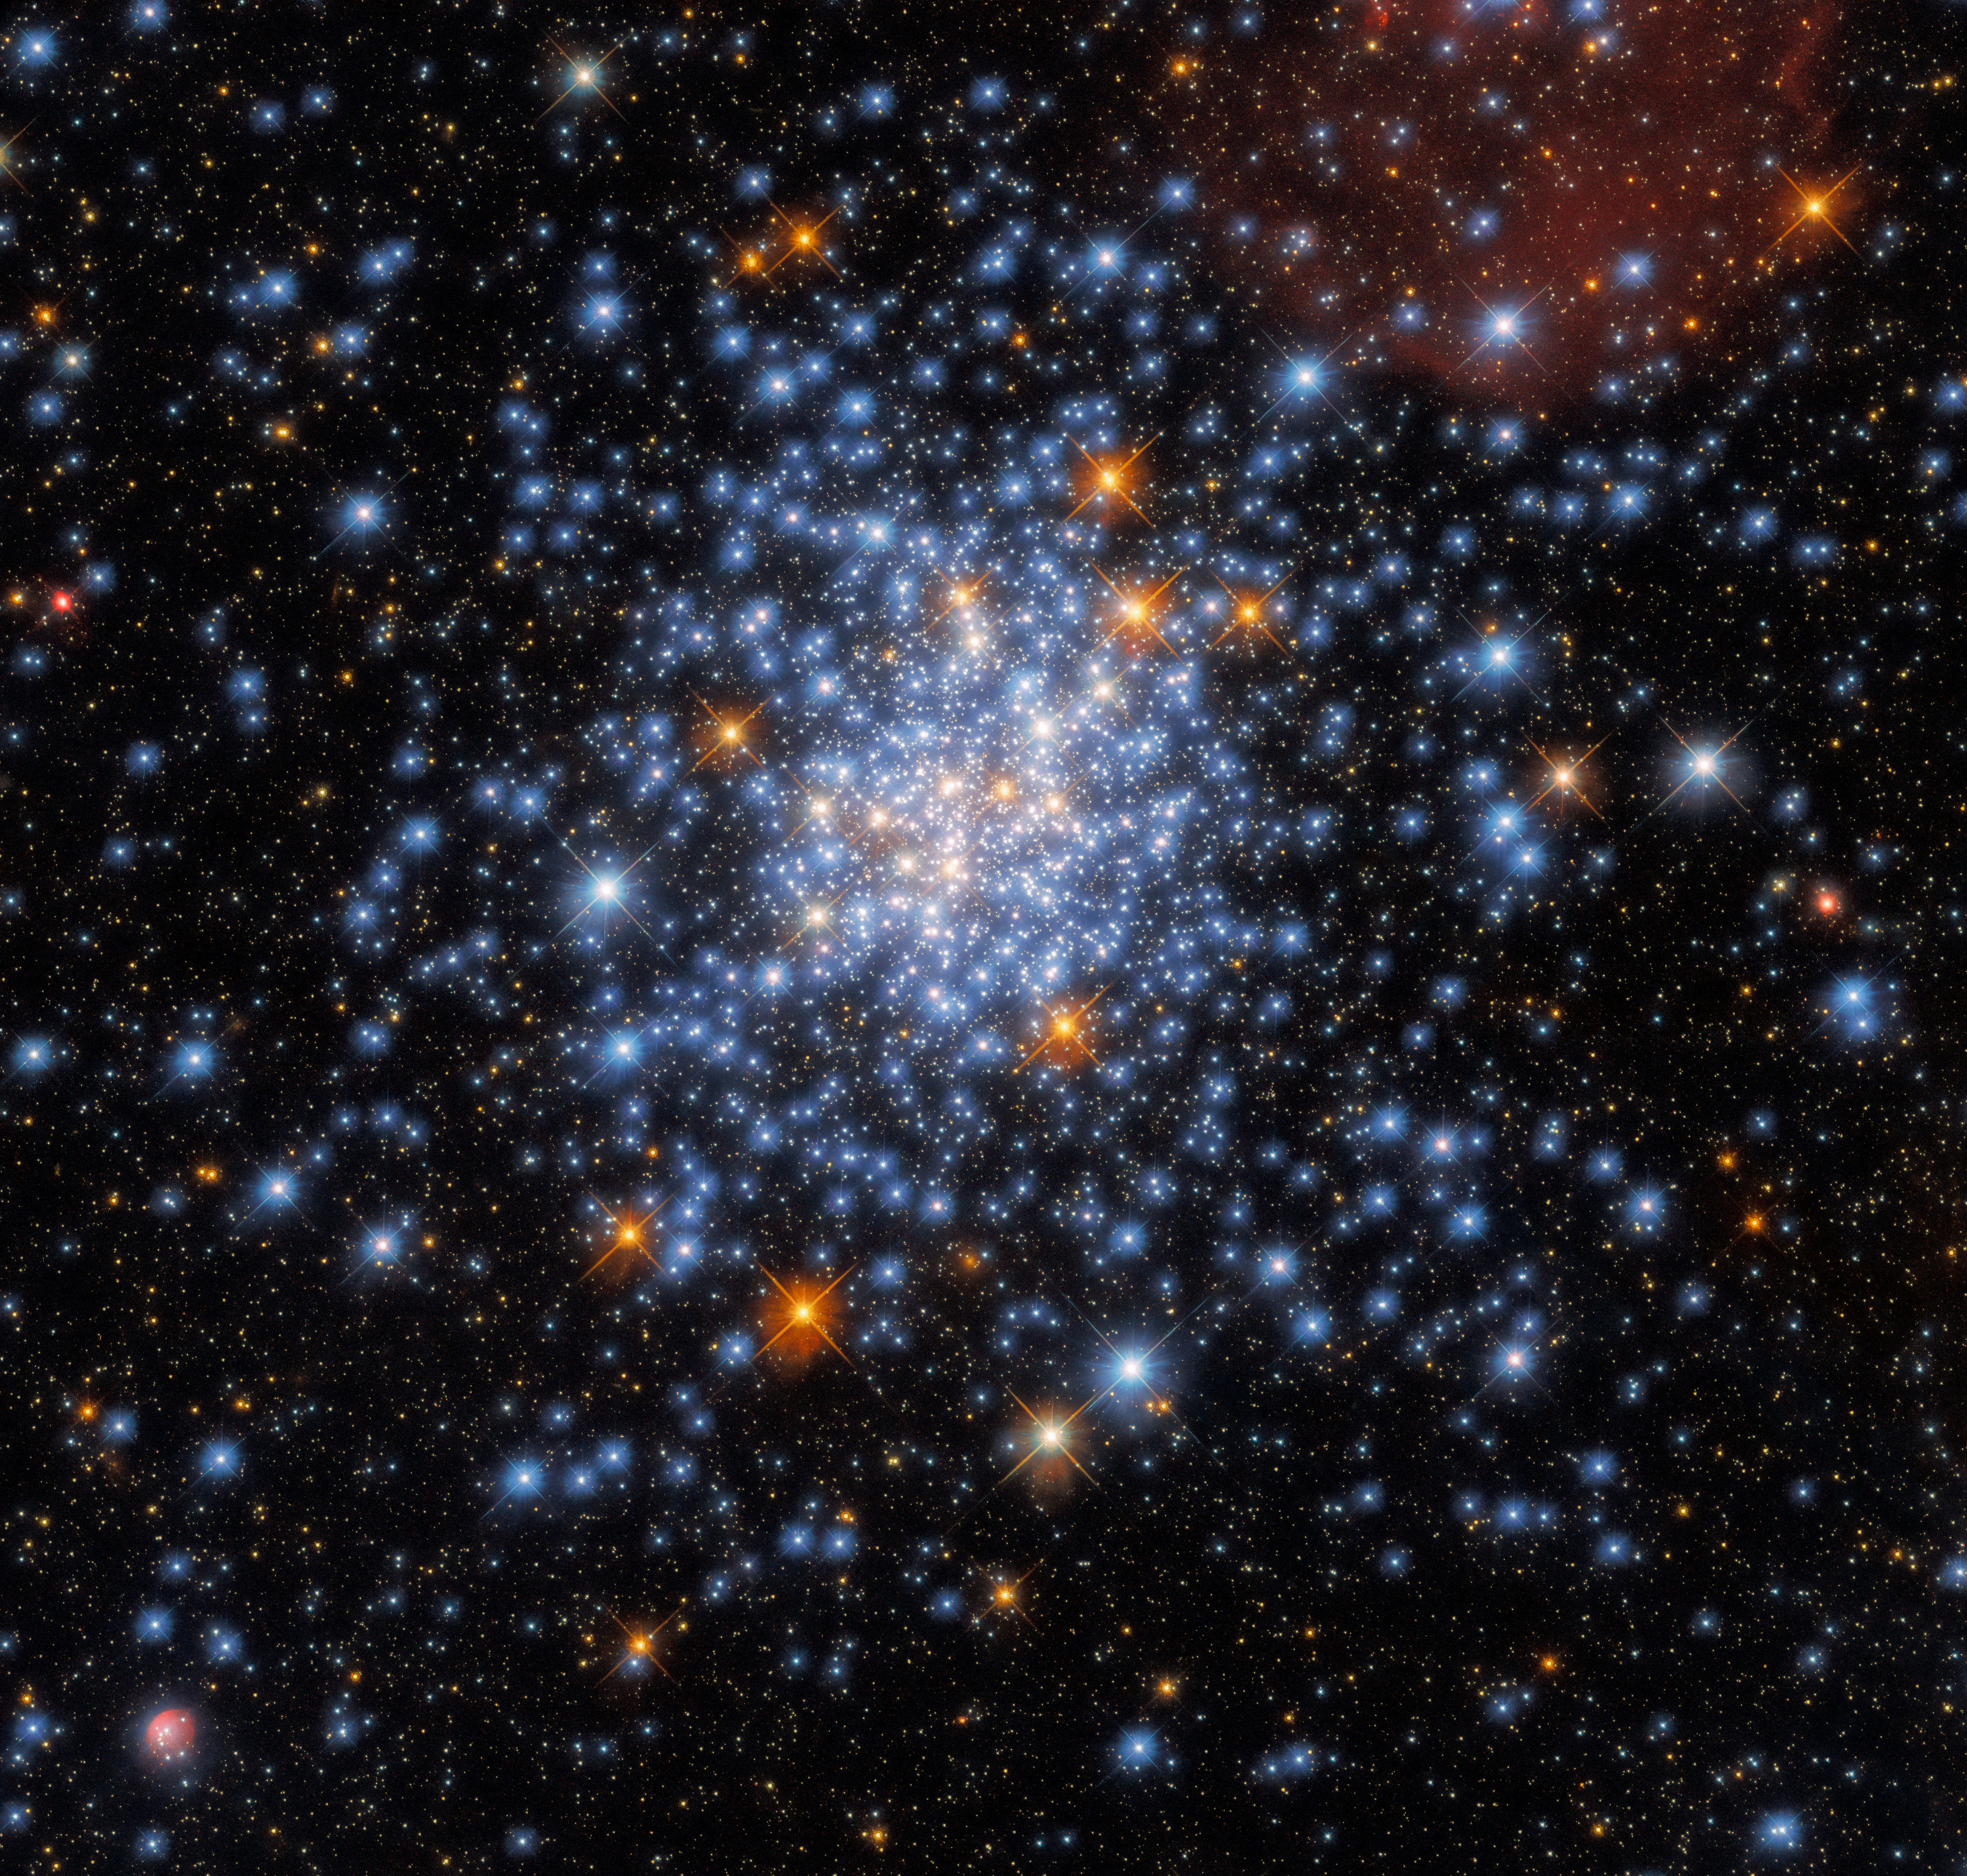

A Scattering of Stars

This Picture of the Week depicts the open star cluster NGC 330, which lies around 180,000 light-years away inside the Small Magellanic Cloud. The cluster — which is in the constellation Tucana (The Toucan) — contains a multitude of stars, many of which are scattered across this striking image.

The most stunning object in this image is actually the very small star cluster in the lower left corner of the image, surrounded by a nebula of ionised hydrogen (red) and dust (blue). Named GALFOR 1, the cluster was discovered in 2018 in Hubble's archival data, which was used to create this latest image from Hubble. To better understand this star cluster, specifically whether the nebula surrounding the cluster also contains a bow shock, scientists will need high resolution infrared imagery from the upcoming NASA/ESA/CSA James Webb Space Telescope.

This image also contains clues about the inner workings of Hubble itself. The criss-cross patterns surrounding the stars in this image — known as diffraction spikes — were created when starlight interacted with the four thin vanes supporting Hubble’s secondary mirror.

As star clusters form from a single primordial cloud of gas and dust, all the stars they contain are roughly the same age. This makes them useful natural laboratories for astronomers to learn how stars form and evolve. This image uses observations from Hubble’s Wide Field Camera 3, and incorporates data from two very different astronomical investigations. The first aimed to understand why stars in star clusters appear to evolve differently from stars elsewhere, a peculiarity first observed by the Hubble Space Telescope. The second aimed to determine how large stars can be before they become doomed to end their lives in cataclysmic supernova explosions.

Credit: ESA/Hubble & NASA, J. Kalirai, A. Milone